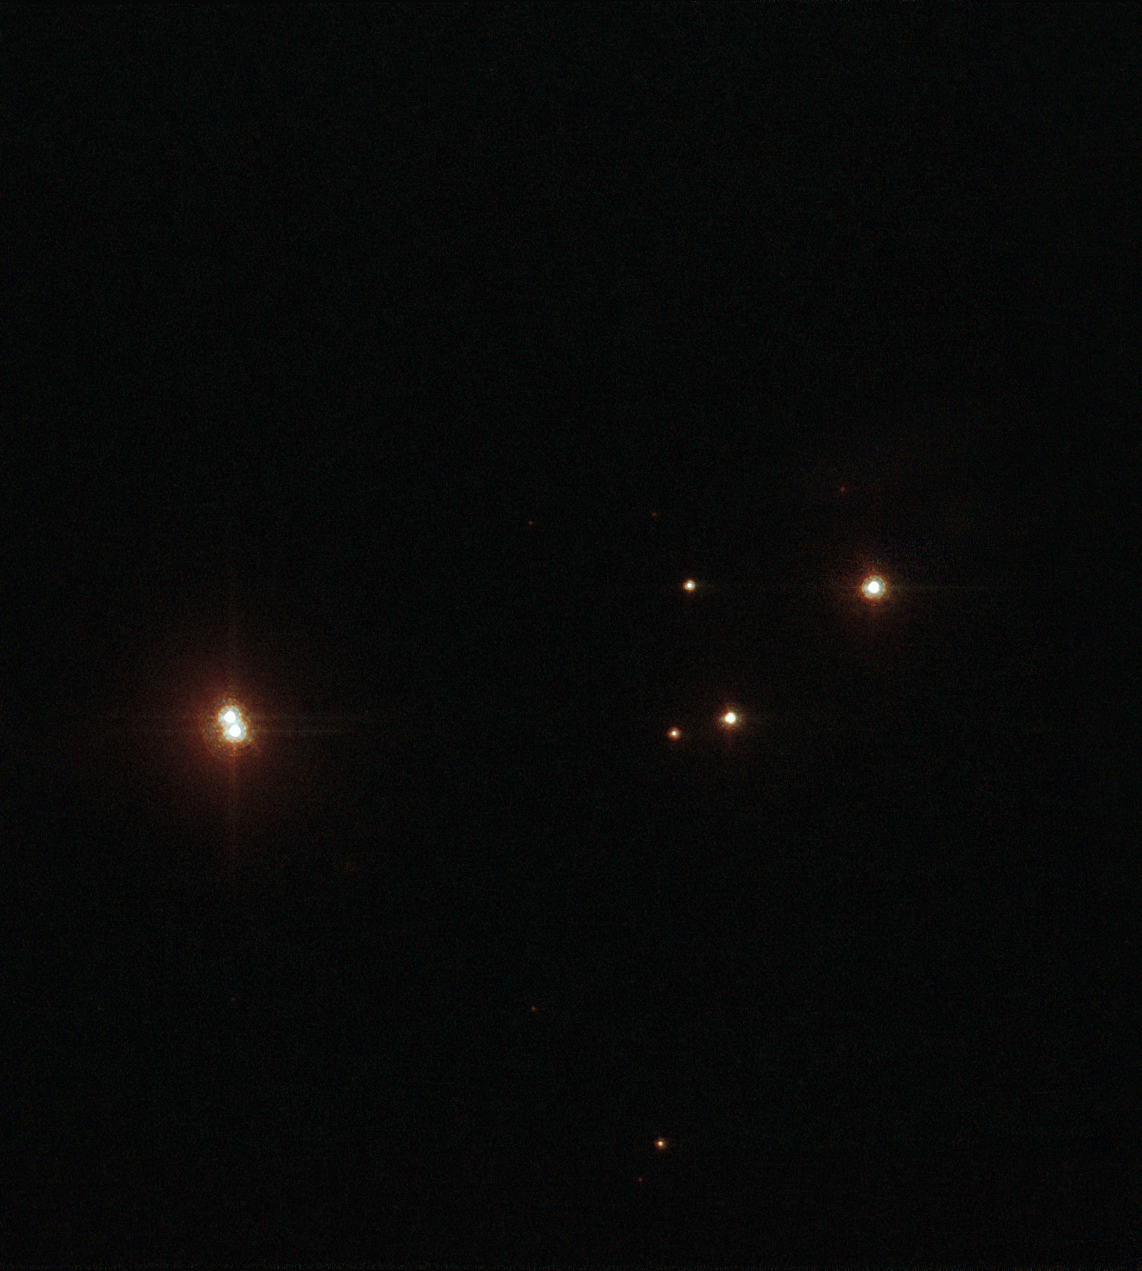

Star on a Hubble diet

Looking closer at Pismis 24-1 with Hubble's ACS High Resolution Channel: it becomes clear that it is in reality two stars.

Credit: NASA, ESA and Jesœs Maíz Apellÿniz (Instituto de astrofísica de Andalucía, Spain). Acknowledgement: Davide De Martin (ESA/Hubble)